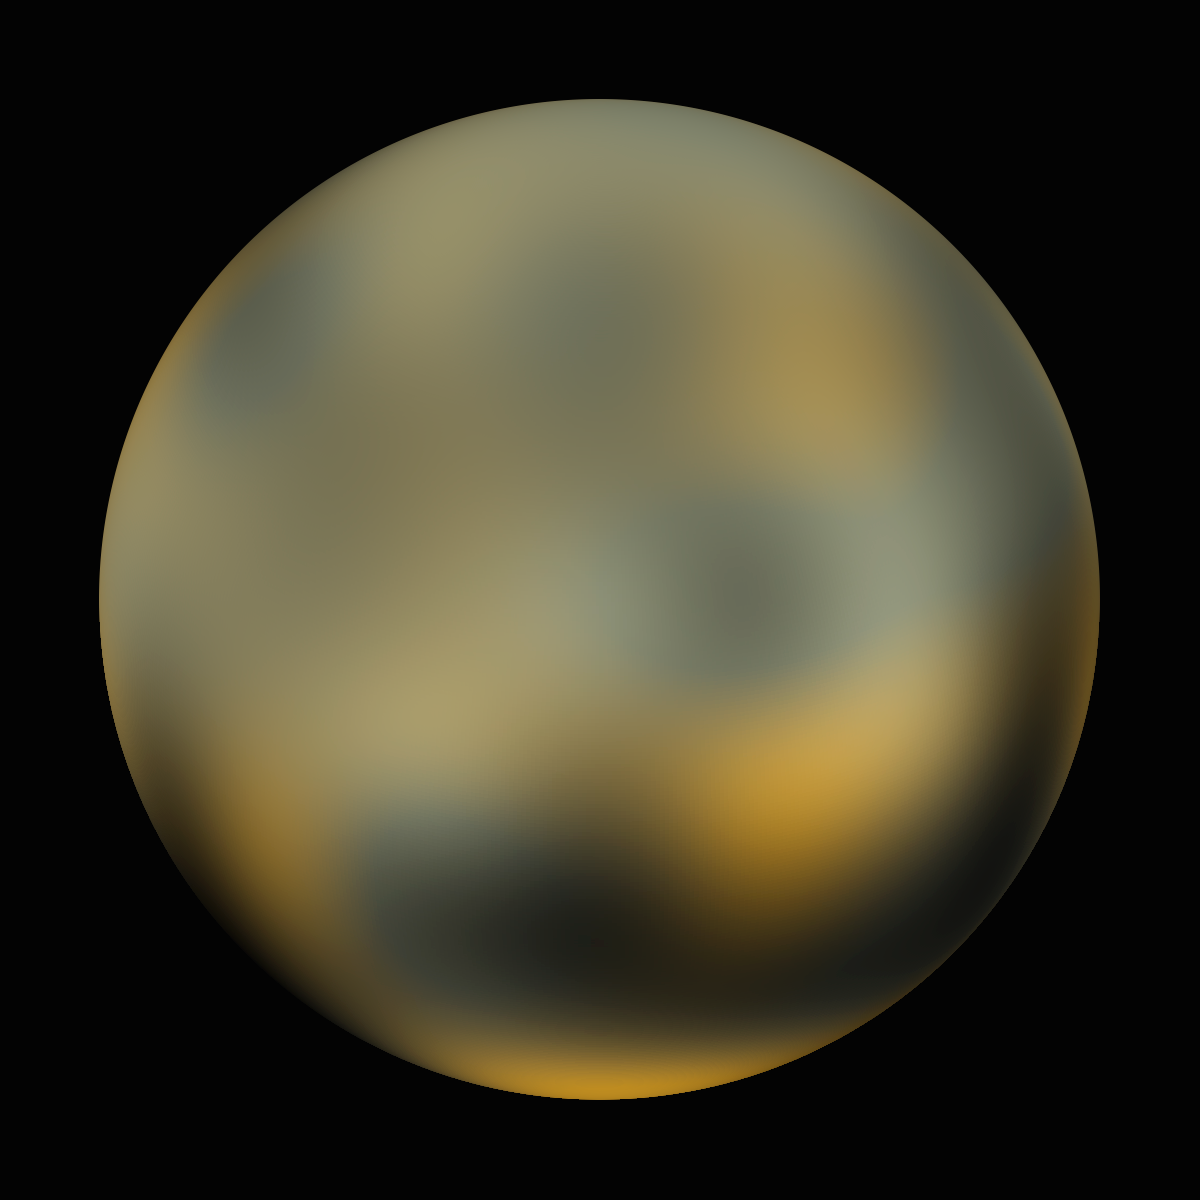

Pluto - 270° longitude

Pluto - 270° longitude.

Credit: NASA, ESA and M. Buie (Southwest Research Institute)